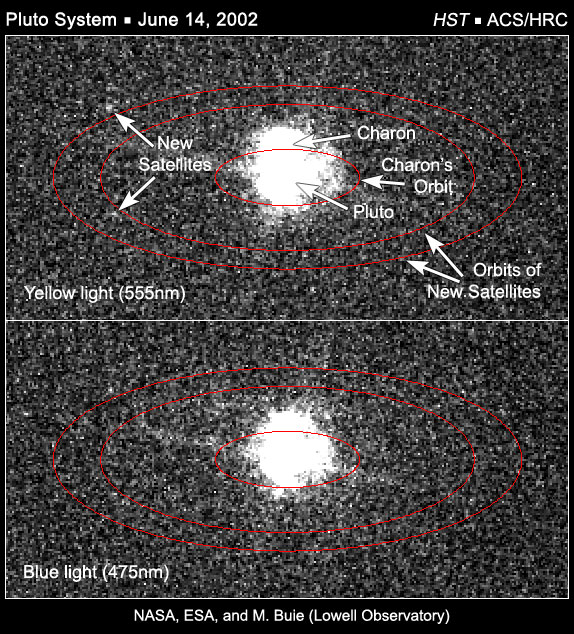

The Pluto system on June 14, 2002

A careful search of Hubble images taken with the ACS/HRC on June 14th, 2002, reveals two objects that are consistent with the expected locations of the newly-discovered satellites. One image (top) was taken in yellow light (555 nm) and the other (bottom) was taken in blue light (475 nm). The ellipse shows the orbital path of the new satellites derived from the May 2005 Hubble observations. The satellites should lie somewhere along this ellipse and, indeed, there are two objects along the predicted path, thus confirming the 2005 observations.

Credit: NASA, ESA, and M. Buie (Lowell Observatory)